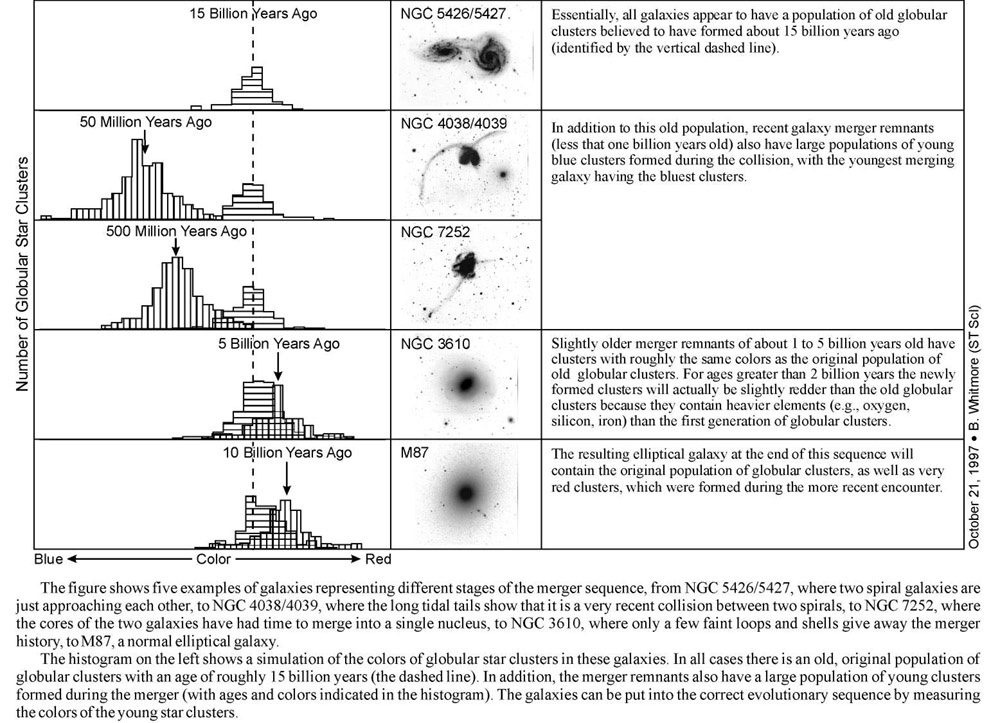

Illustration of determining stages of interacting galaxies

This graph shows 5 different galaxies at different stages of the merger sequence.

Credit: NASA & ESA